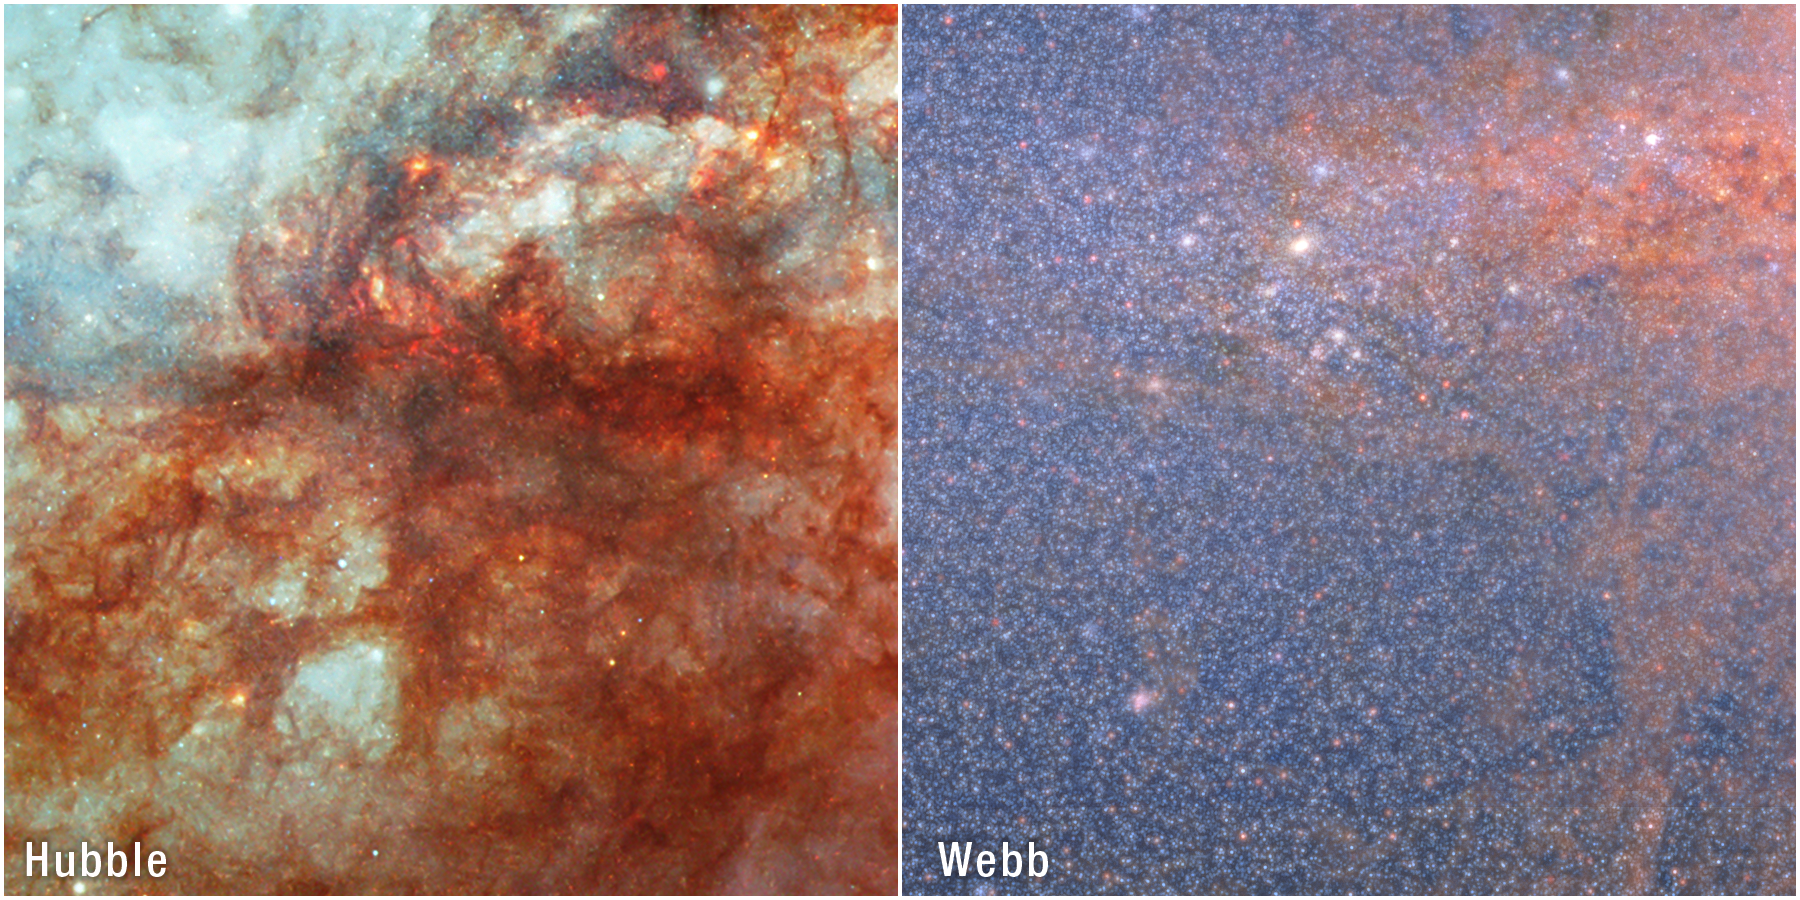

The Cigar Galaxy: M82 (Hubble and Webb)

Edge-on spiral galaxy Messier 82 (M82) has been an object of study by many observatories over the years, including the NASA/ESA Hubble Space Telescope and most recently the NASA/ESA/CSA James Webb Space Telescope.

This side-by-side comparison shows the same region of M82 as seen by Hubble (left) and Webb (right). Hubble’s visible-light view is limited because of the amount of dust within M82, which shrouds the galaxy’s details. Bright, bluish light radiating from the centre is due to star formation. A notable thick lane of dust, black in the centre and red around the edges, diagonally stretches across the scene. Thinner strands and clumps of reddish dust cover the majority of the view.

With its ability to observe the near-infrared Universe, Webb can pierce through the dusty environment of M82 and reveal what was once hidden to astronomers. With Webb, millions of individual stars within M82’s heart (seen here as luminous blue-white granules) are resolved in unprecedented clarity. Red-orange clumps, most noticeable toward the right, are small dust grains.

Credit: NASA, ESA, CSA, A. Smercina (STScI), T. Williams (University of Manchester). Image processing: A. Pagan (STScI).